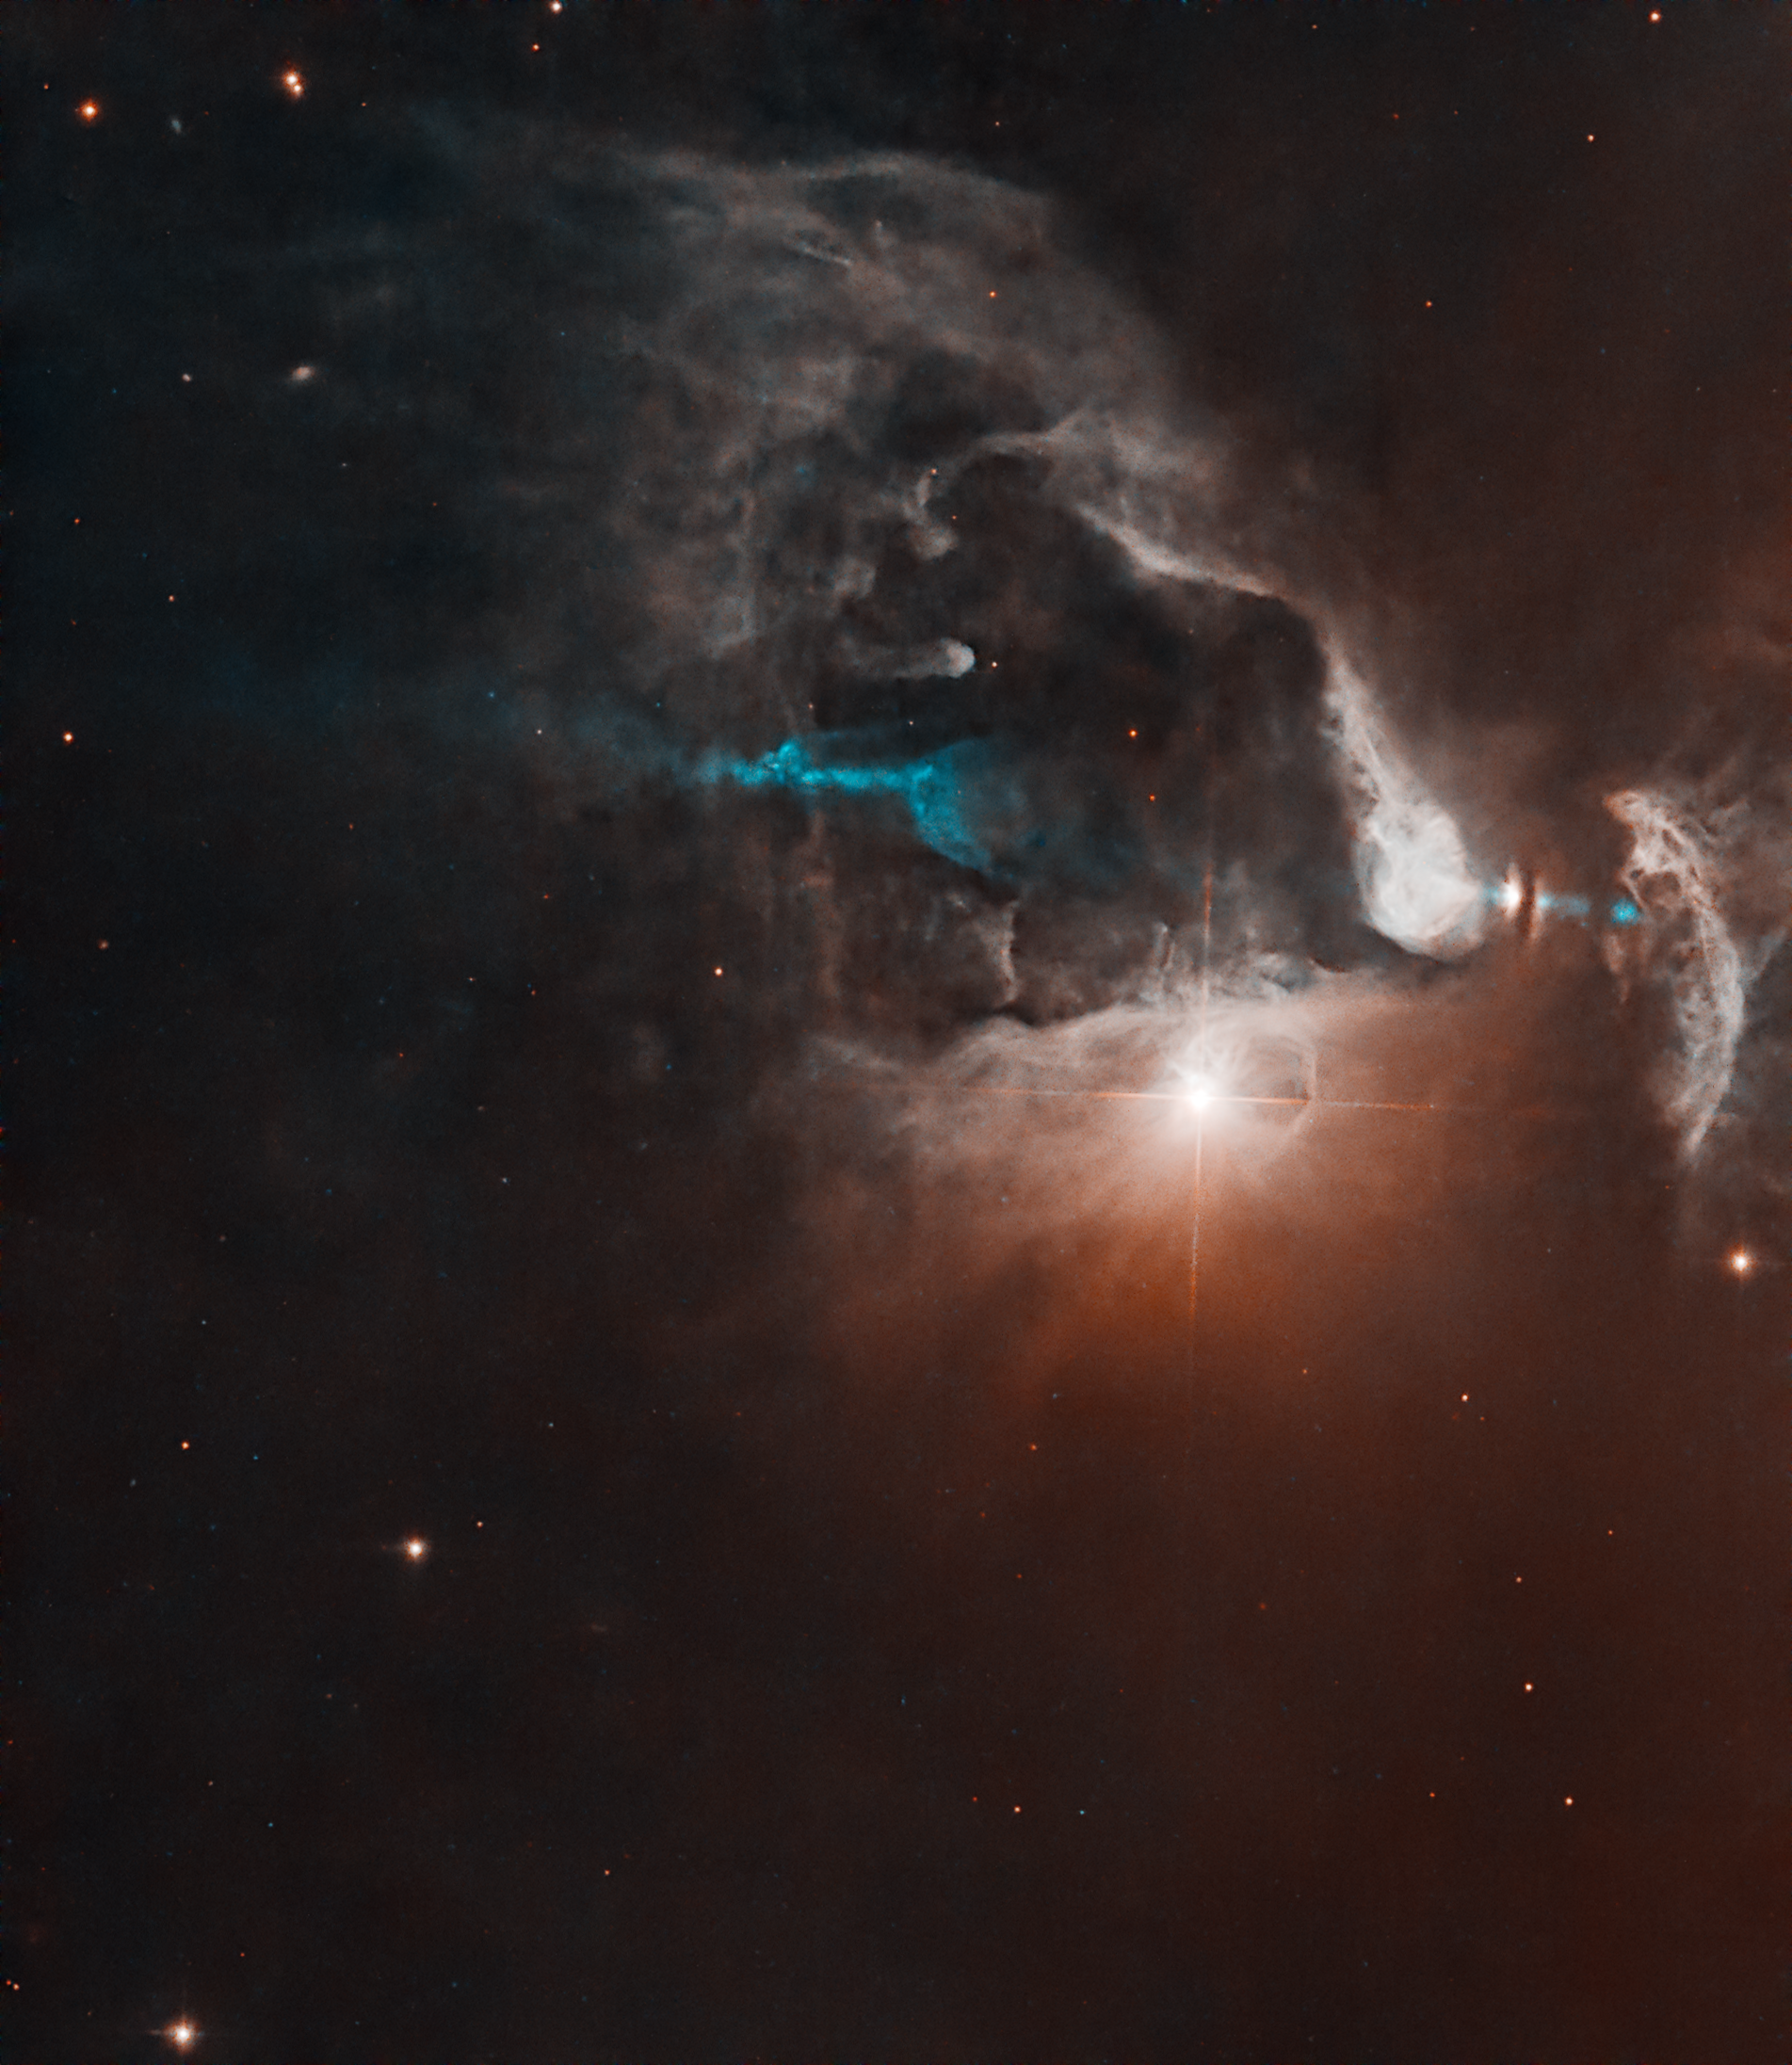

FS Tau

FS Tau is a multi-star system made up of FS Tau A, the bright star-like object near the middle of the image, and FS Tau B (Haro 6-5B), the bright object to the far right that is partially obscured by a dark, vertical lane of dust. The young objects are surrounded by softly illuminated gas and dust of this stellar nursery. The system is only about 2.8 million years old, very young for a star system. Our Sun, by contrast, is about 4.6 billion years old.

FS Tau B is a newly forming star, or protostar, and is surrounded by a protoplanetary disc, a pancake-shaped collection of dust and gas leftover from the formation of the star that will eventually coalesce into planets. The thick dust lane, seen nearly edge-on, separates what are thought to be the illuminated surfaces of the disc.

FS Tau B is likely in the process of becoming a T Tauri star, a type of young variable star that hasn’t begun nuclear fusion yet but is beginning to evolve into a hydrogen-fueled star similar to our Sun. Protostars shine with the heat energy released as the gas clouds from which they are forming collapse, and from the accretion of material from nearby gas and dust. Variable stars are a class of star whose brightness changes noticeably over time.

FS Tau A is itself a T Tauri binary system, consisting of two stars orbiting each other.

Protostars are known to eject fast-moving, column-like streams of energised material called jets, and FS Tau B provides a striking example of this phenomenon. The protostar is the source of an unusual asymmetric, double-sided jet, visible here in blue. Its asymmetrical structure may be because mass is being expelled from the object at different rates.

FS Tau B is also classified as a Herbig-Haro object. Herbig–Haro objects form when jets of ionised gas ejected by a young star collide with nearby clouds of gas and dust at high speeds, creating bright patches of nebulosity.

FS Tau is part of the Taurus-Auriga region, a collection of dark molecular clouds that are home to numerous newly forming and young stars, roughly 450 light-years away in the constellations of Taurus and Auriga. Hubble has previously observed this region, whose star-forming activity makes it a compelling target for astronomers. Hubble made these observations as part of an investigation of edge-on dust discs around young stellar objects.

Credit: NASA, ESA, K. Stapelfeldt (NASA JPL), G. Kober (NASA/Catholic University of America)